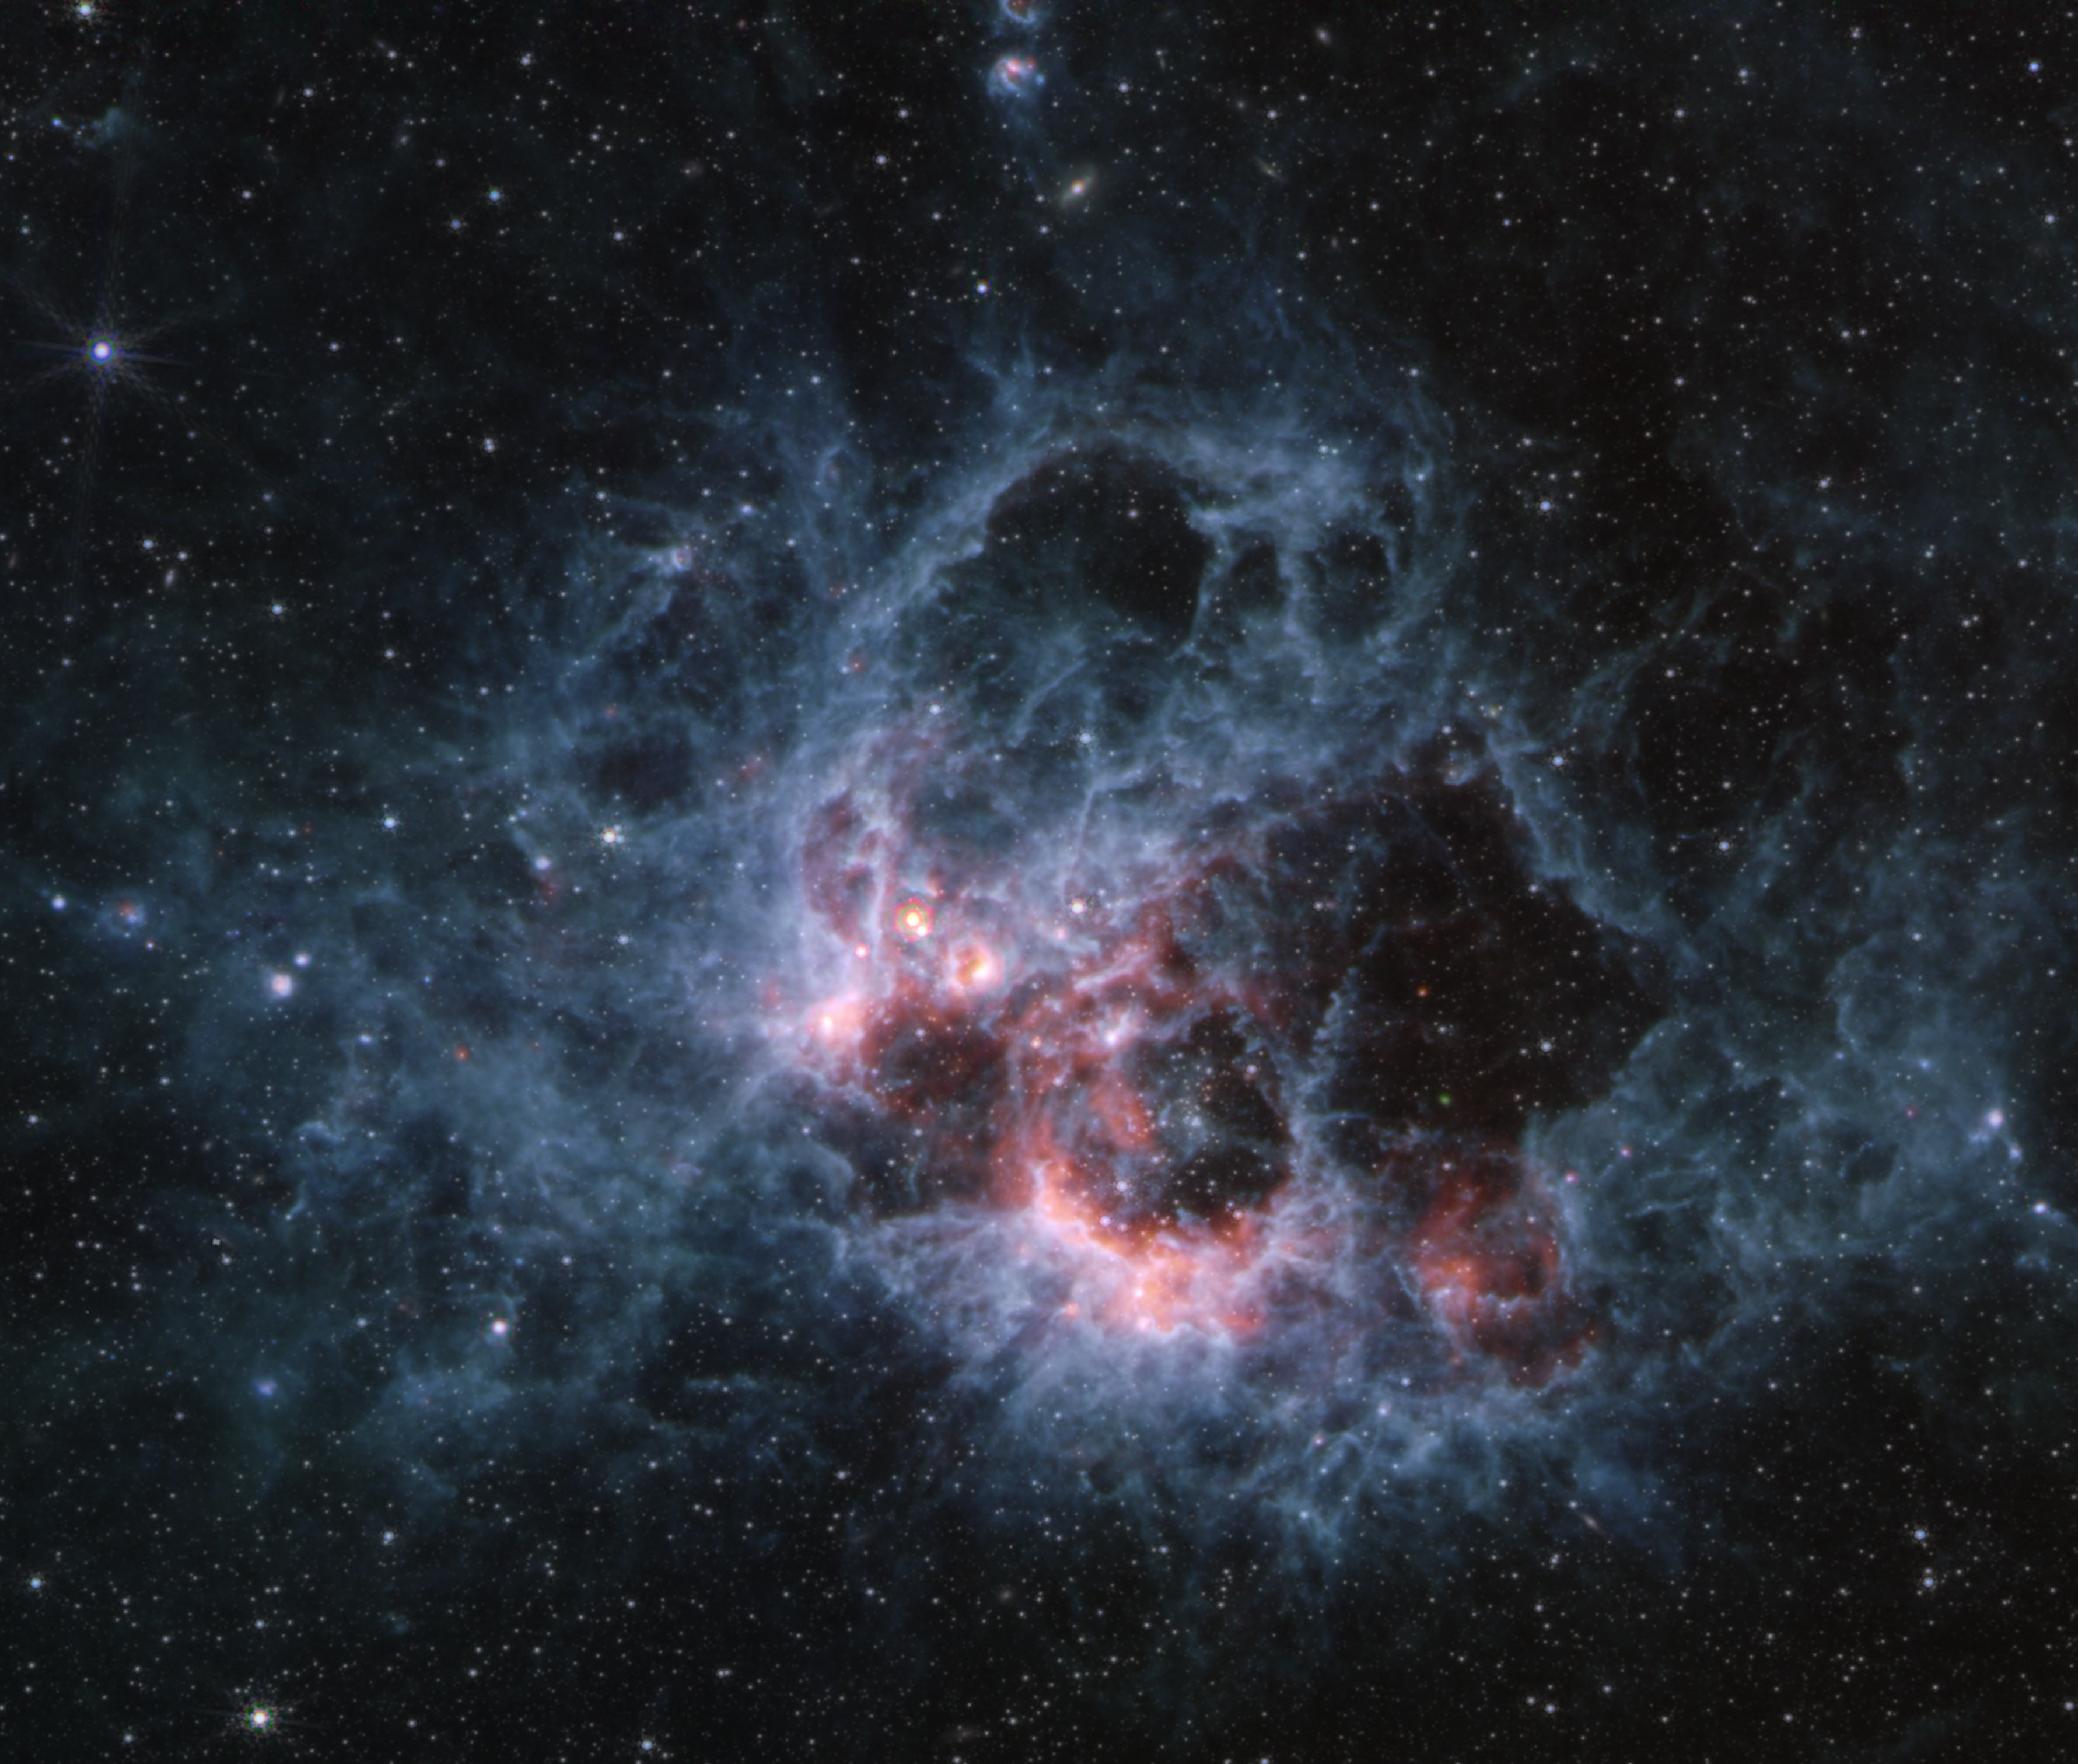

NGC 604 (MIRI image)

This image from the NASA/ESA/CSA James Webb Space Telescope’s MIRI (Mid-Infrared Instrument) of star-forming region NGC 604 shows how large clouds of cooler gas and dust glow at mid-infrared wavelengths. This region is a hotbed of star formation and home to more than 200 of the hottest, most massive kinds of stars, all in the early stages of their lives.

In the MIRI view of NGC 604, there are noticeably fewer stars than Webb’s NIRCam image. This is because hot stars emit much less light at these wavelengths. Some of the stars seen in this image are red supergiants — stars that are cool but very large, hundreds of times the diameter of our Sun. The blue tendrils of material signify the presence of polycyclic aromatic hydrocarbons, or PAHs.

Credit: NASA, ESA, CSA, STScI